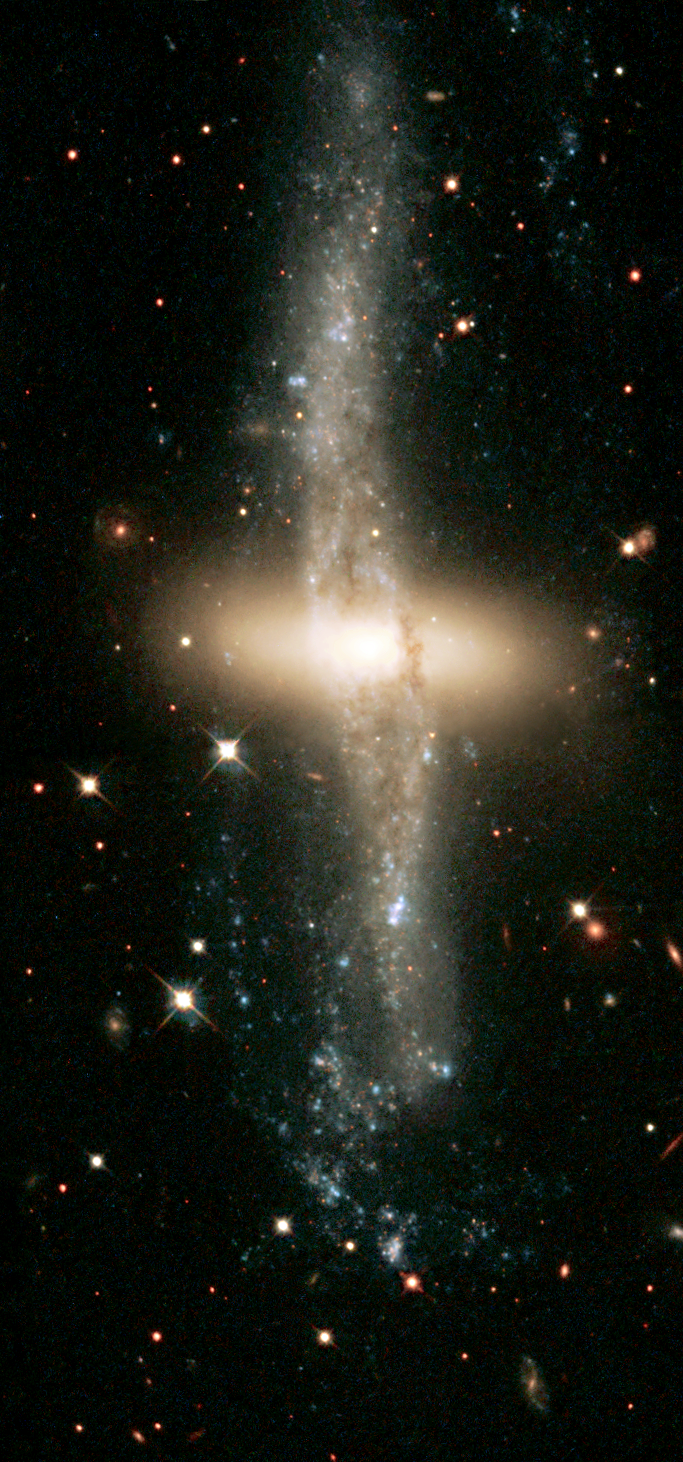

Ring around NGC 4650A

Space Telescope Science Institute astronomers are giving the public chances to decide where to aim the NASA/ESA Hubble Space Telescope. Guided by 8, 000 Internet voters, Hubble has already been used to take a close-up, multi-color picture of the most popular object from a list of candidates, the extraordinary 'polar-ring' galaxy NGC 4650A.

Located about 130 million light-years away, NGC 4650A is one of only 100 known polar-ring galaxies. Their unusual disk-ring structure is not yet understood fully. One possibility is that polar rings are the remnants of colossal collisions between two galaxies sometime in the distant past, probably at least 1 billion years ago. What is left of one galaxy has become the rotating inner disk of old red stars in the center.

Credit: The Hubble Heritage Team (AURA/STScI/NASA/ESA)